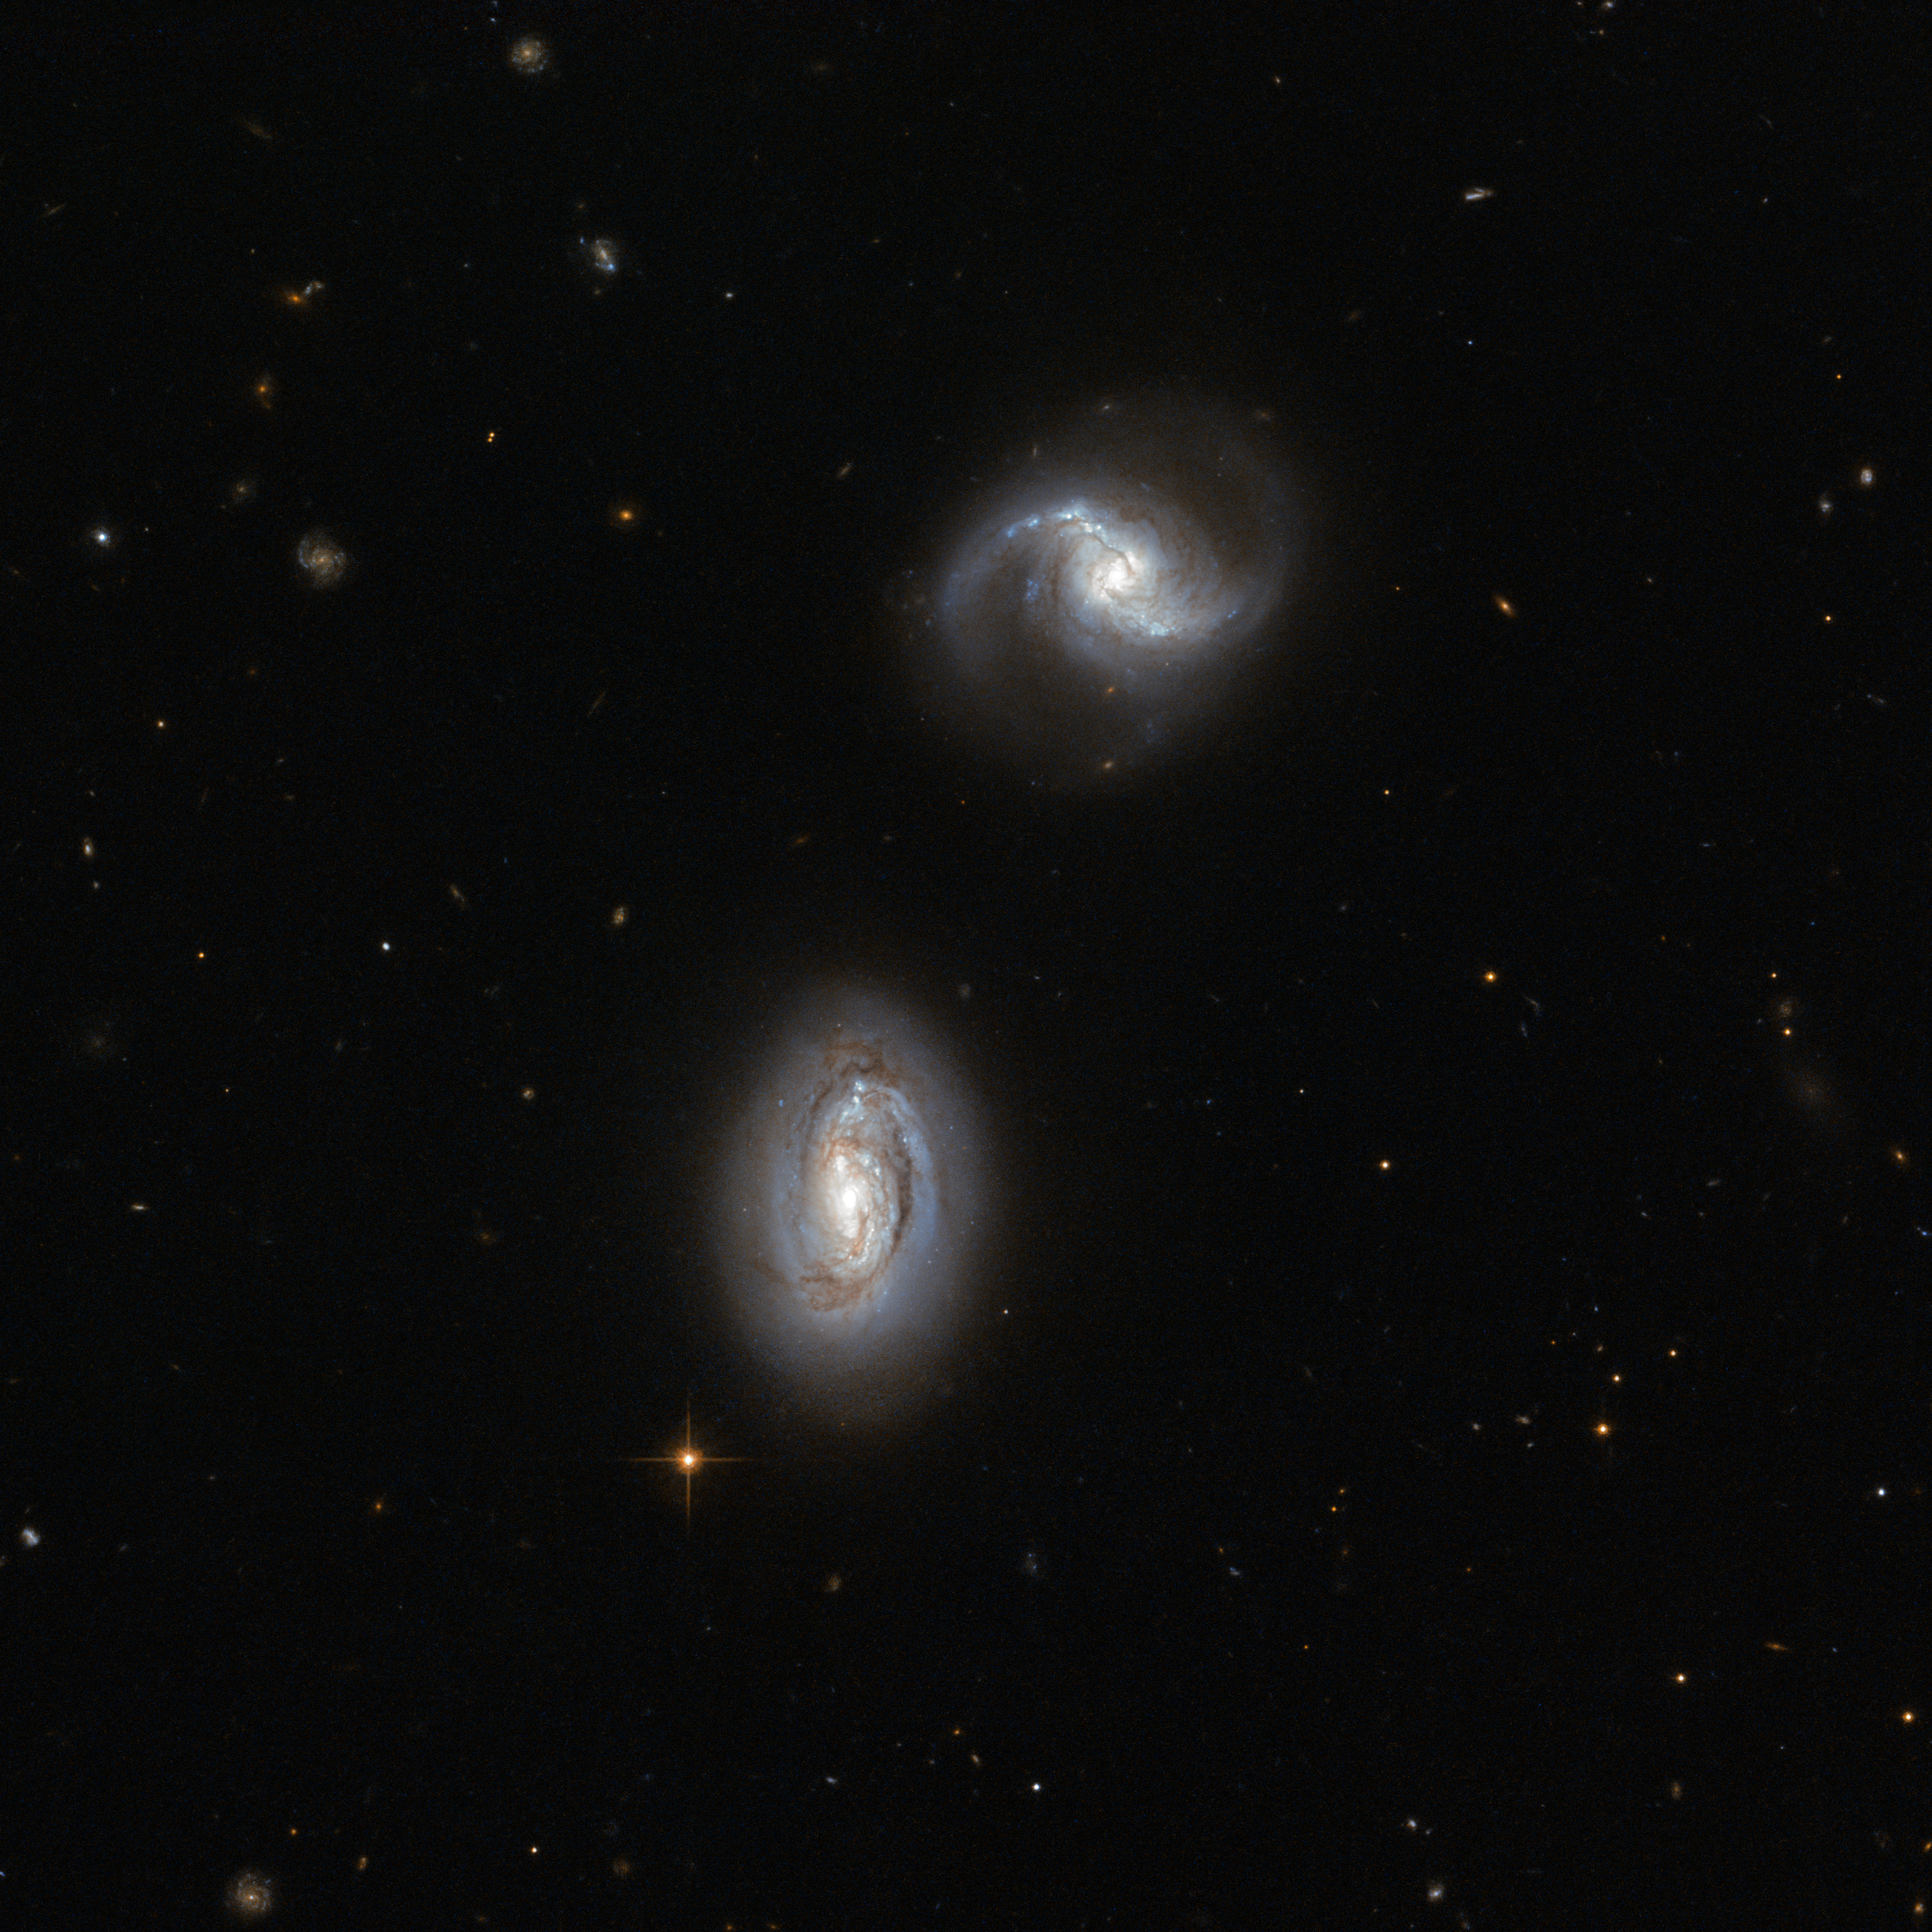

Inseparable galactic twins

Looking towards the constellation of Triangulum (The Triangle), in the northern sky, lies the galaxy pair MRK 1034. The two very similar galaxies, named PGC 9074 and PGC 9071, are close enough to one another to be bound together by gravity, although no gravitational disturbance can yet be seen in the image. These objects are probably only just beginning to interact gravitationally.

Both are spiral galaxies, and are presented to our eyes face-on, so we are able to appreciate their distinctive shapes. On the left of the image, spiral galaxy PGC 9074 shows a bright bulge and two spiral arms tightly wound around the nucleus, features which have led scientists to classify it as a type Sa galaxy. Close by, PGC 9071 — a type Sb galaxy — although very similar and almost the same size as its neighbour, has a fainter bulge and a slightly different structure to its arms: their coils are further apart.

The spiral arms of both objects clearly show dark patches of dust obscuring the light of the stars lying behind, mixed with bright blue clusters of hot, recently-formed stars. Older, cooler stars can be found in the glowing, compact yellowish bulge towards the centre of the galaxy. The whole structure of each galaxy is surrounded by a much fainter round halo of old stars, some residing in globular clusters.

Gradually, these two neighbours will attract each other, the process of star formation will be increased and tidal forces will throw out long tails of stars and gas. Eventually, after maybe hundreds of millions of years, the structures of the interacting galaxies will merge together into a new, larger galaxy.

The images combined to create this picture were captured by Hubble's Advanced Camera for Surveys (ACS). A version of this image was submitted to the Hubble’s Hidden Treasures image processing competition by Judy Schmidt.

Credit: ESA/Hubble & NASA Acknowledgement: Judy Schmidt